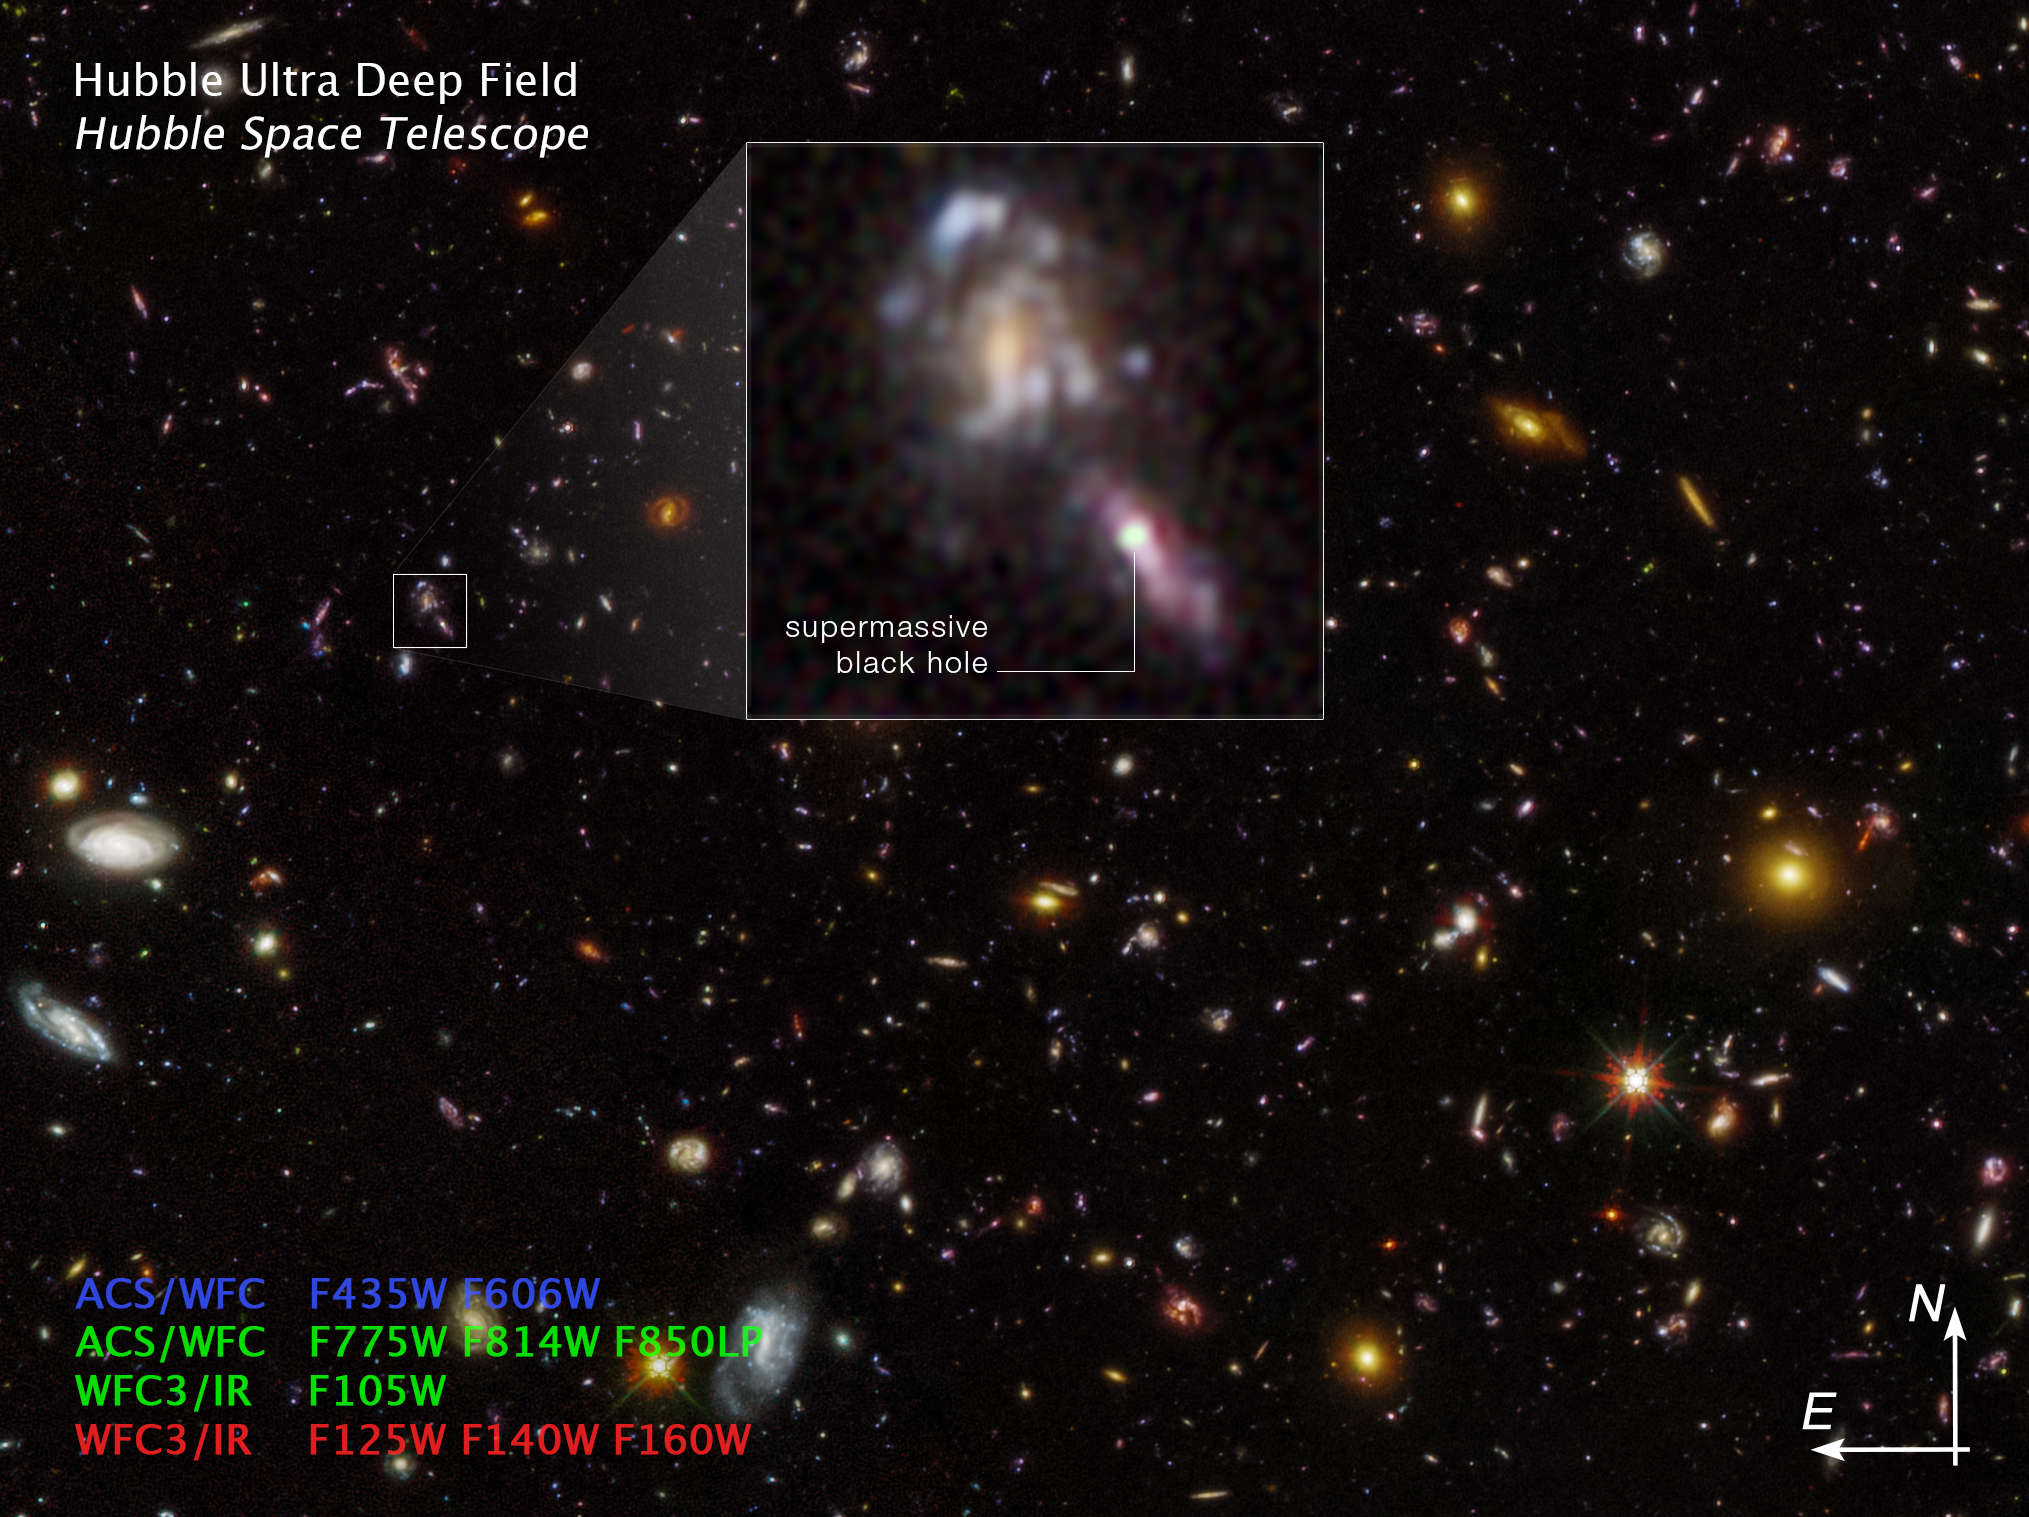

Supermassive Black Holes in Hubble Ultra Deep Field (compass image)

This is an image of the Hubble Ultra Deep Field, taken in 2004. By comparing exposures taken in later years, astronomers found evidence for flickering supermassive black holes in the hearts of early galaxies. One example is seen as a bright object in the inset. Some supermassive black holes do not swallow surrounding material constantly, but in fits and starts, making their brightness flicker. This can be detected by comparing Hubble Ultra Deep Field frames taken at different epochs. The survey found more black holes than predicted.

The image was created from Hubble data from the following proposals: 9978, 10086 (S. Beckwith); 11563 (G. Illingworth); 12498 (R. Ellis); and 17073 (M. Hayes). These images are composites of separate exposures acquired by the ACS and WFC3 instruments on the Hubble Space Telescope.

Credit: NASA, ESA, M. Hayes (Stockholm University), J. DePasquale (STScI)